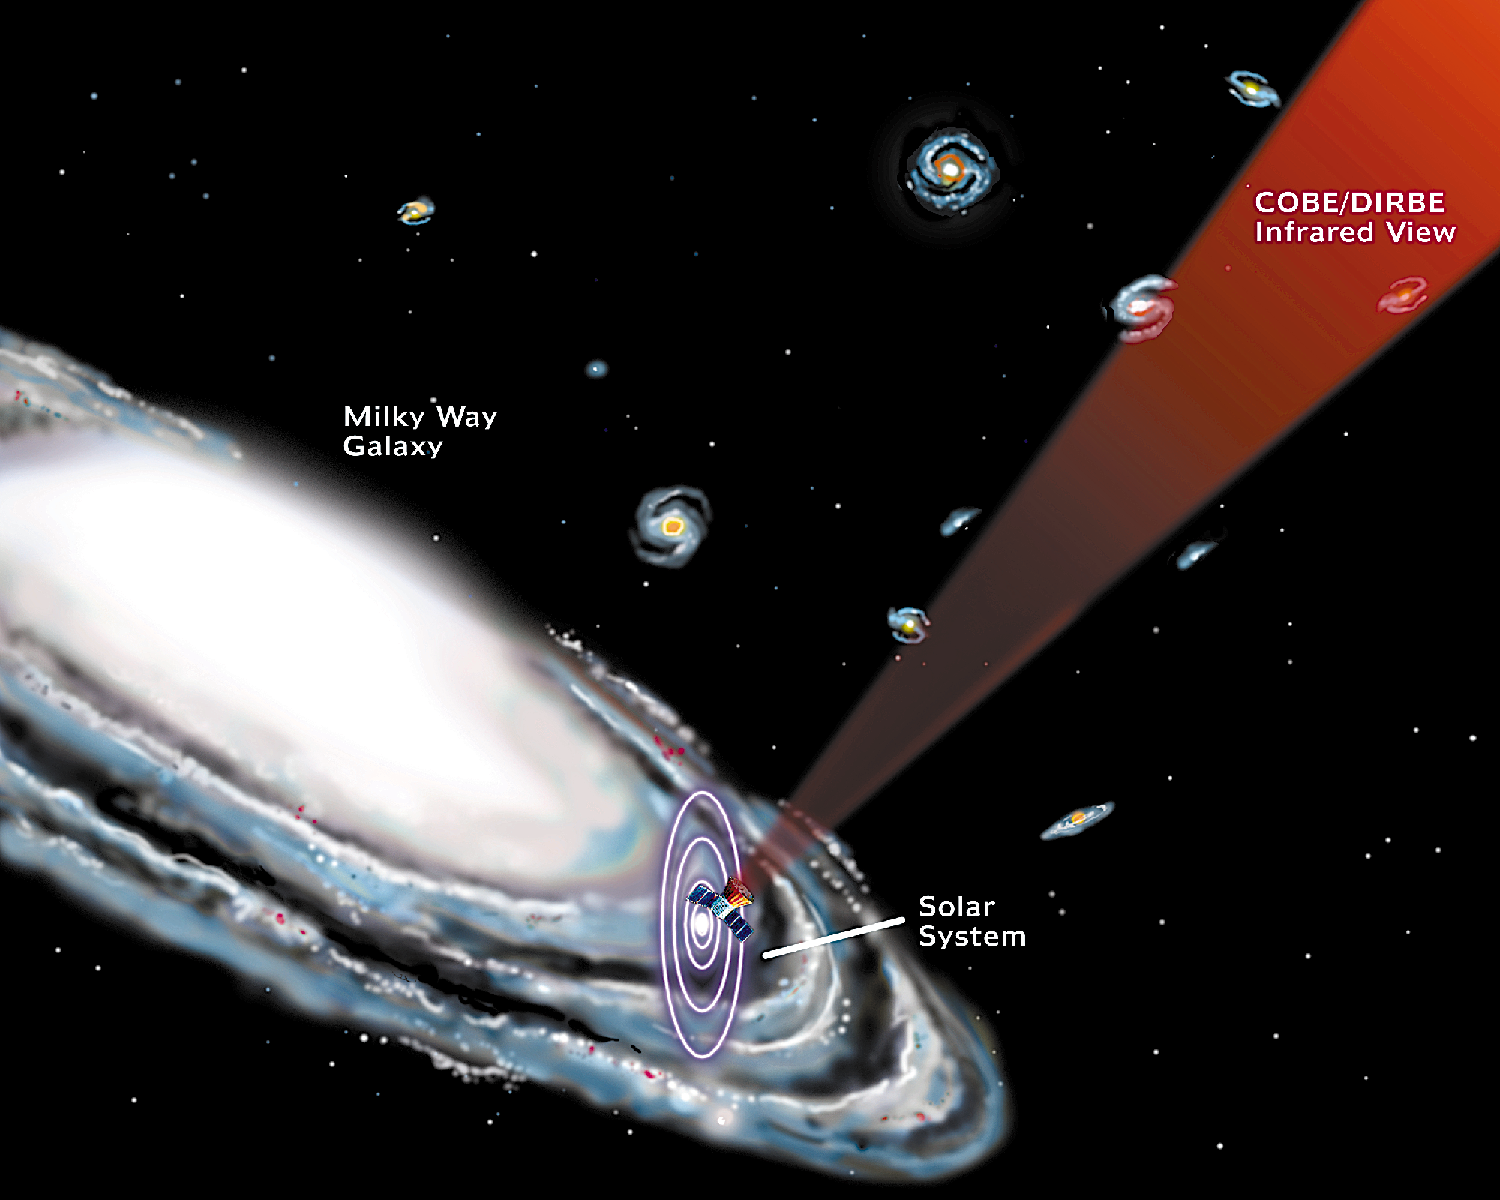

Diagram illustrating the relative direction and orientation of the spacecraft with respect to the Solar System, Milky Way, and nearby galaxies.

Cosmic Background Explorer (COBE), was launched in 1989.

Credit: NASA & ESA